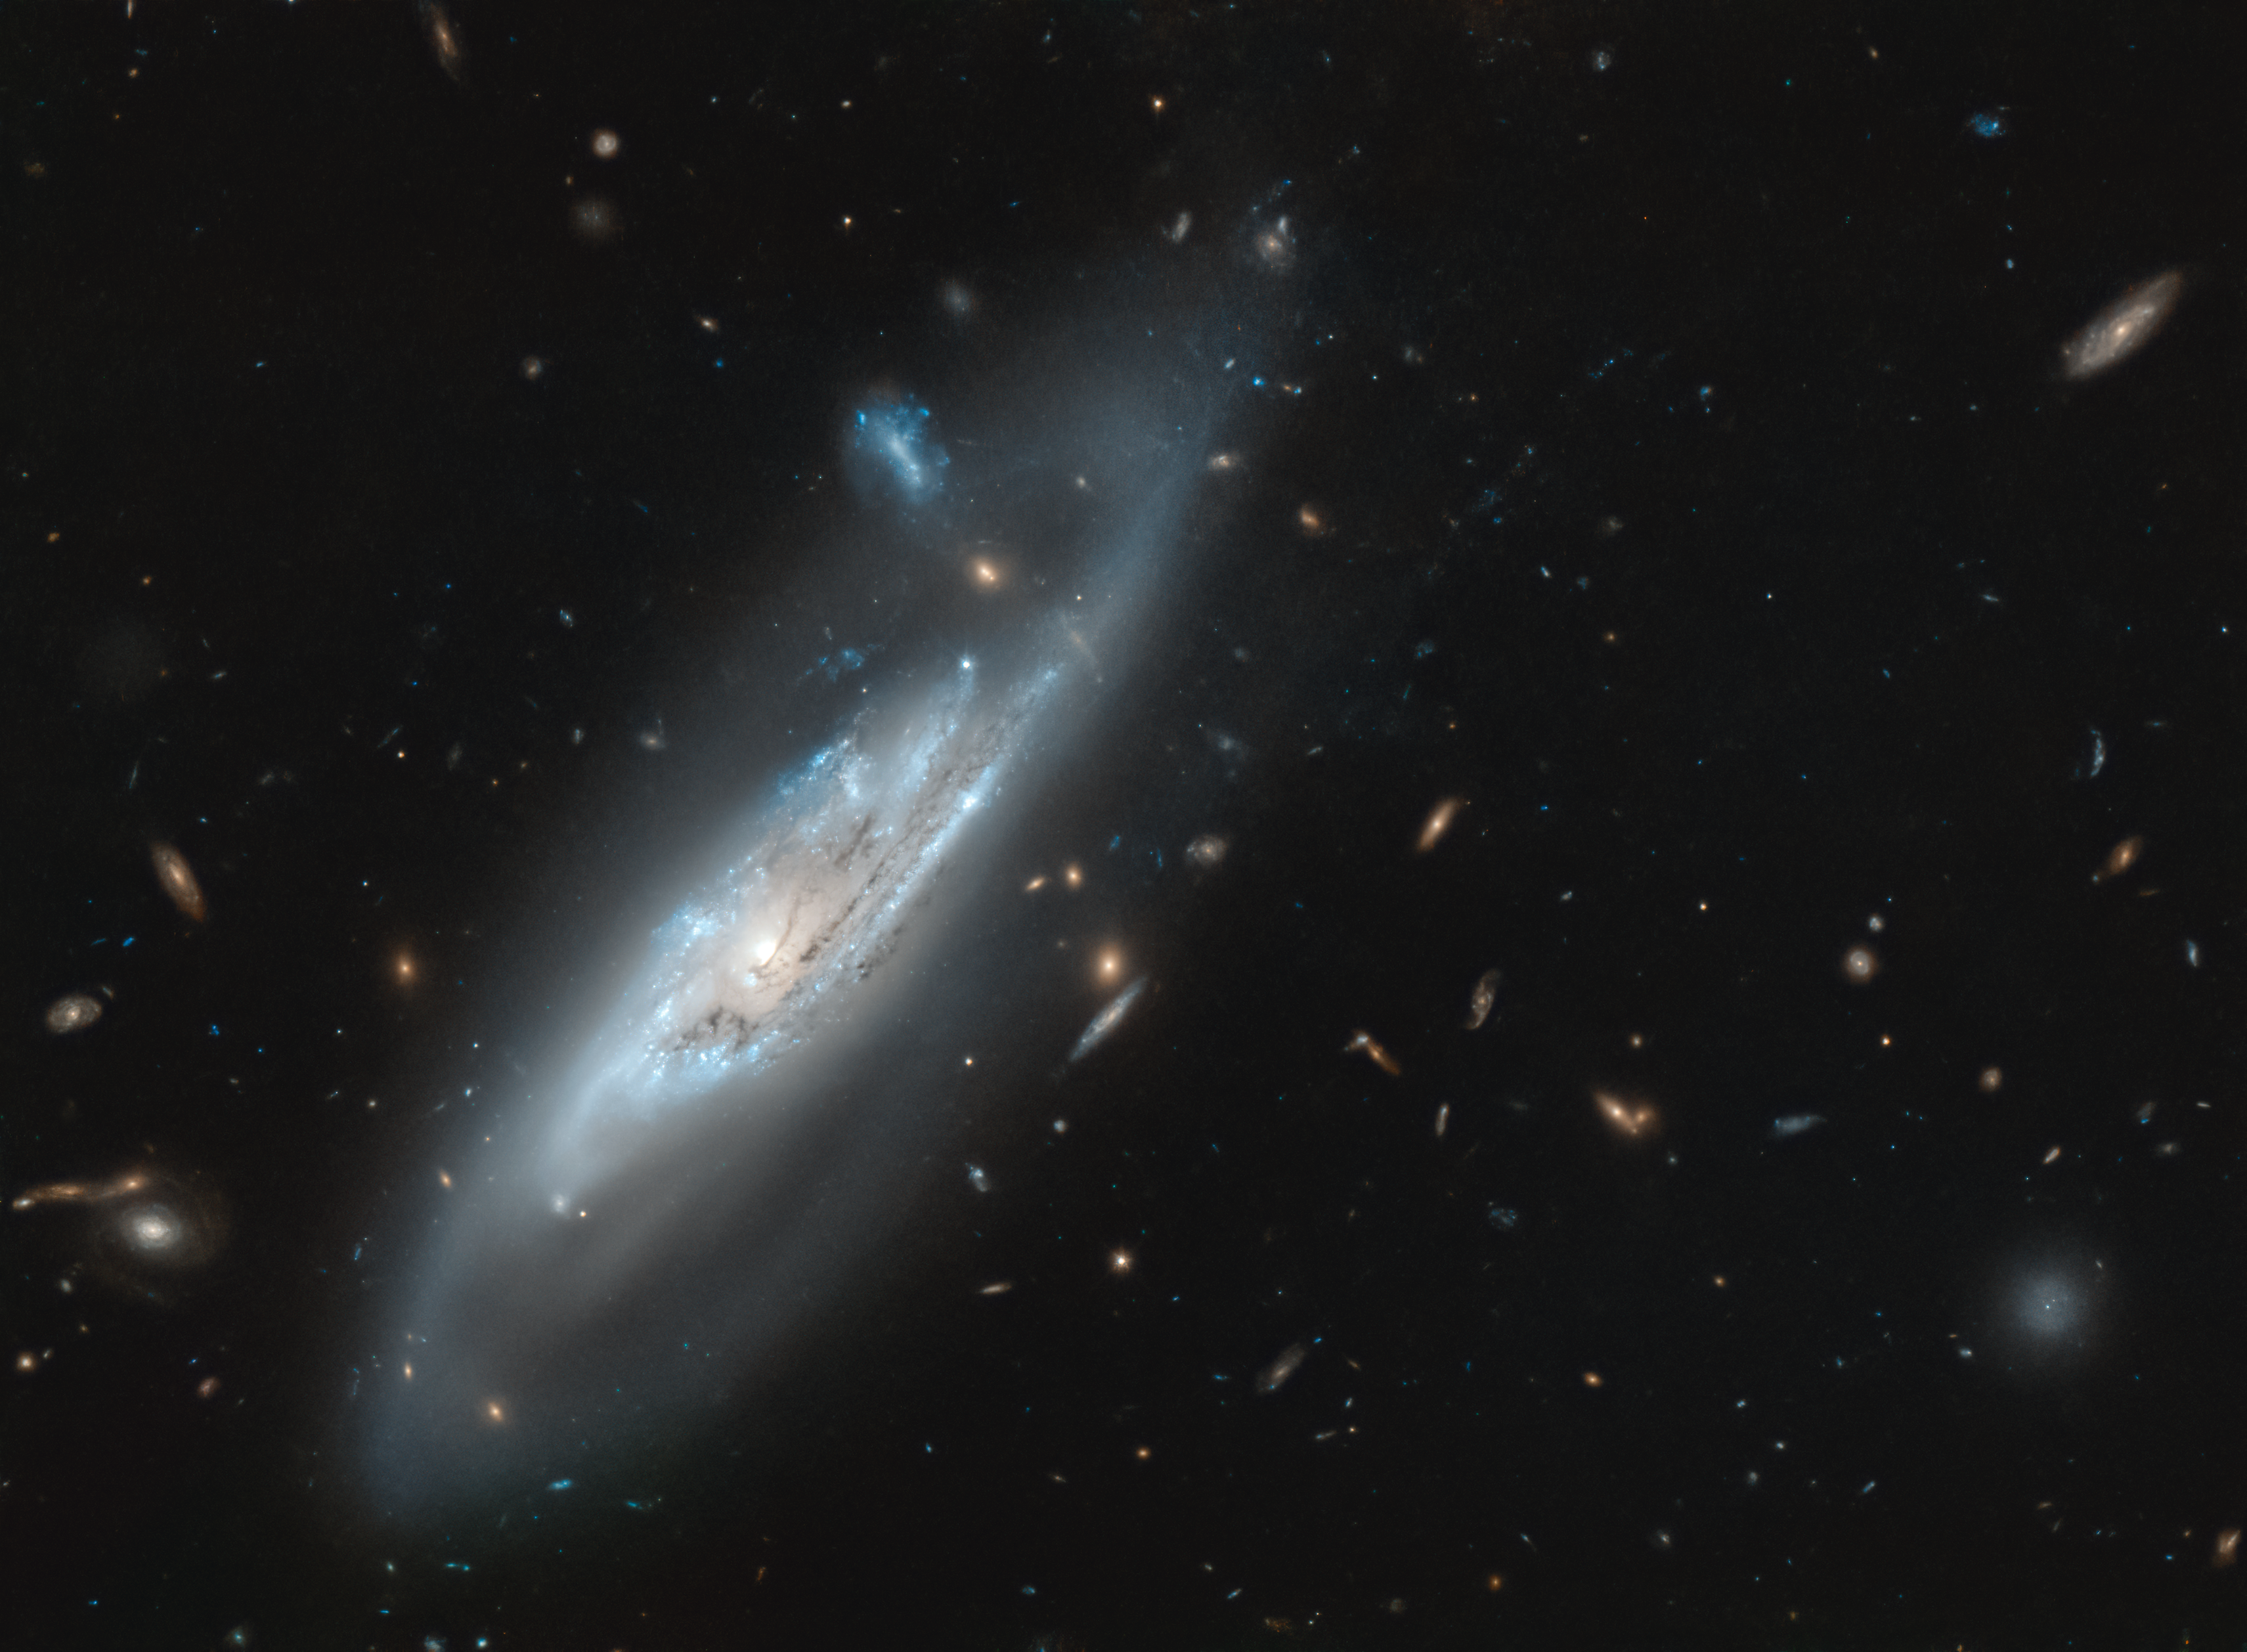

A Discovery of Ghostly Arms

A notable feature of most spiral galaxies is the multitude of arching spiral arms that seemingly spin out from the galaxy’s centre. In this image, taken with the NASA/ESA Hubble Space Telescope, the stunning silvery-blue spiral arms of the galaxy NGC 4848 are observed in immense detail. Not only do we see the inner section of the spiral arms containing hundreds of thousands of young, bright, blue stars, but Hubble has also captured the extremely faint wispy tails of the outer spiral arms.

This wispy barred spiral galaxy was first discovered in 1865 by the German astronomer Heinrich Louis d’Arrest. In his career, Heinrich also notably discovered the asteroid 76 Freia and many other galaxies and he also contributed to the discovery of Neptune.

If you are situated in the Northern Hemisphere with a large telescope, you might just be able to observe the ghost-like appearance of this faint galaxy within faint constellation of Coma Berenices (Berenice’s Hair).

Credit: ESA/Hubble & NASA, M. Gregg